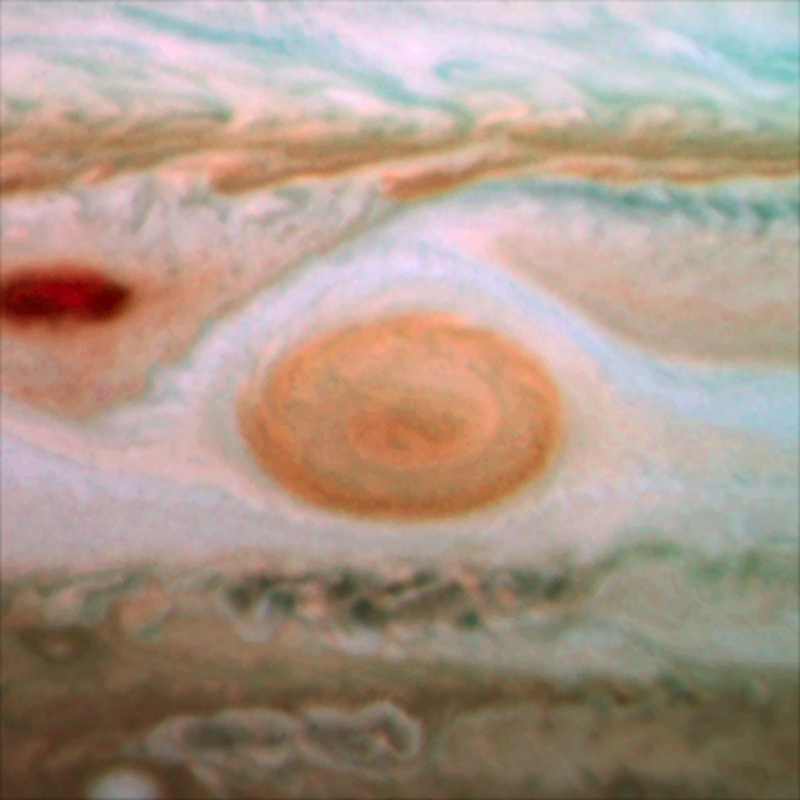

Jupiter's Great Red Spot in 2009

An image of Jupiter's Great Red Spot taken in 2009 with Hubble's WFC3 camera. The spot’s diameter here is just under 18 000km.

Credit: NASA, ESA and H. Hammel (SSI and AURA)